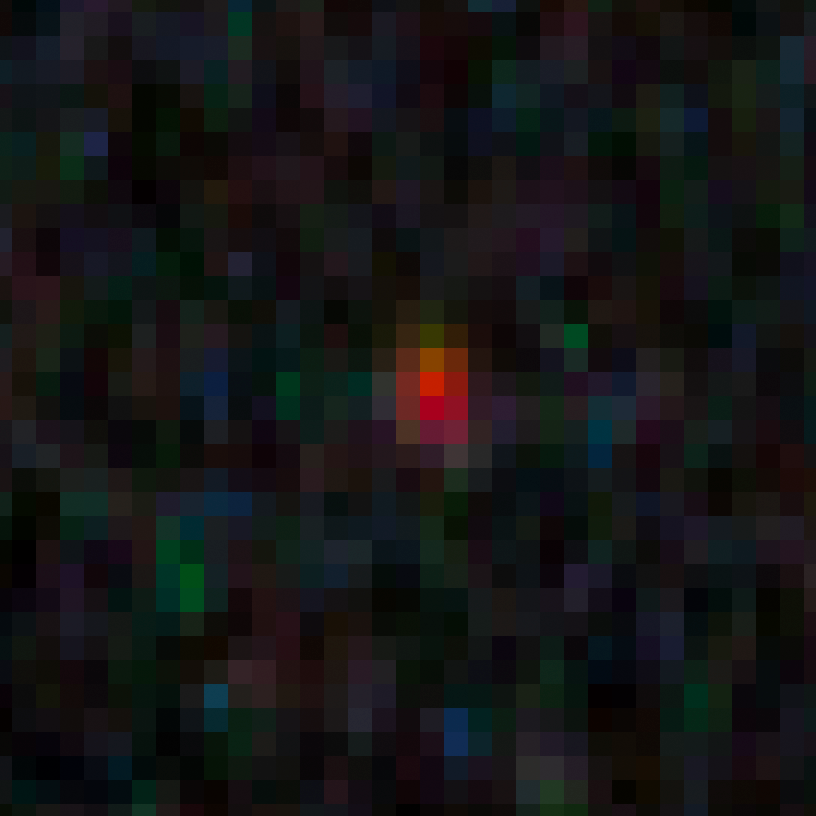

GN-z10-3 in the GOODS-N field

This image shows an ultra-bright young galaxy known as GN-z10-3, discovered in the Hubble GOODS North field (Great Observatories Origins Deep Survey).

Researchers found four unusually red objects, including GN-z10-3, that appear as they existed just 500 million years after the Big Bang. They appear red because their light has been stretched to longer infrared wavelengths by the expansion of the Universe. These extremely compact and bright galaxies present a puzzle to researchers because they are much more luminous than anything previously seen at such an early epoch. The young galaxies are bright because they are forming stars at a much faster rate than for other galaxies found at such early times.

Credit: NASA, ESA, G. Illingworth (University of California, Santa Cruz), P. Oesch (University of California, Santa Cruz; Yale University), R. Bouwens and I. Labbé (Leiden University), and the Science Team